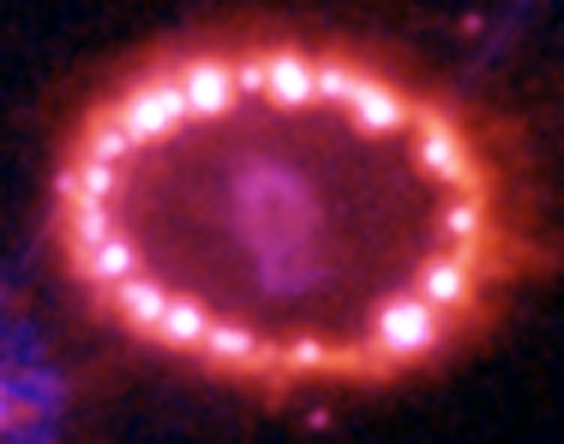

Hubble Supernova 1987A Scrapbook (1994-2003) - Image 14

in 1987, astronomers spotted the brightest stellar explosion ever seen since the one observed by Johannes Kepler over 400 years ago. Called SN 1987A, the titanic supernova explosion blazed with the power of 100,000,000 suns for several months following its discovery on Feb. 23 of that year. Although the supernova itself is over a million times fainter than when it was first discovered, a new light show in the space surrounding it is just beginning.

Credit: NASA/ESA, P. Challis, R. Kirshner (Harvard-Smithsonian Center for Astrophysics) and B. Sugerman (STScI)